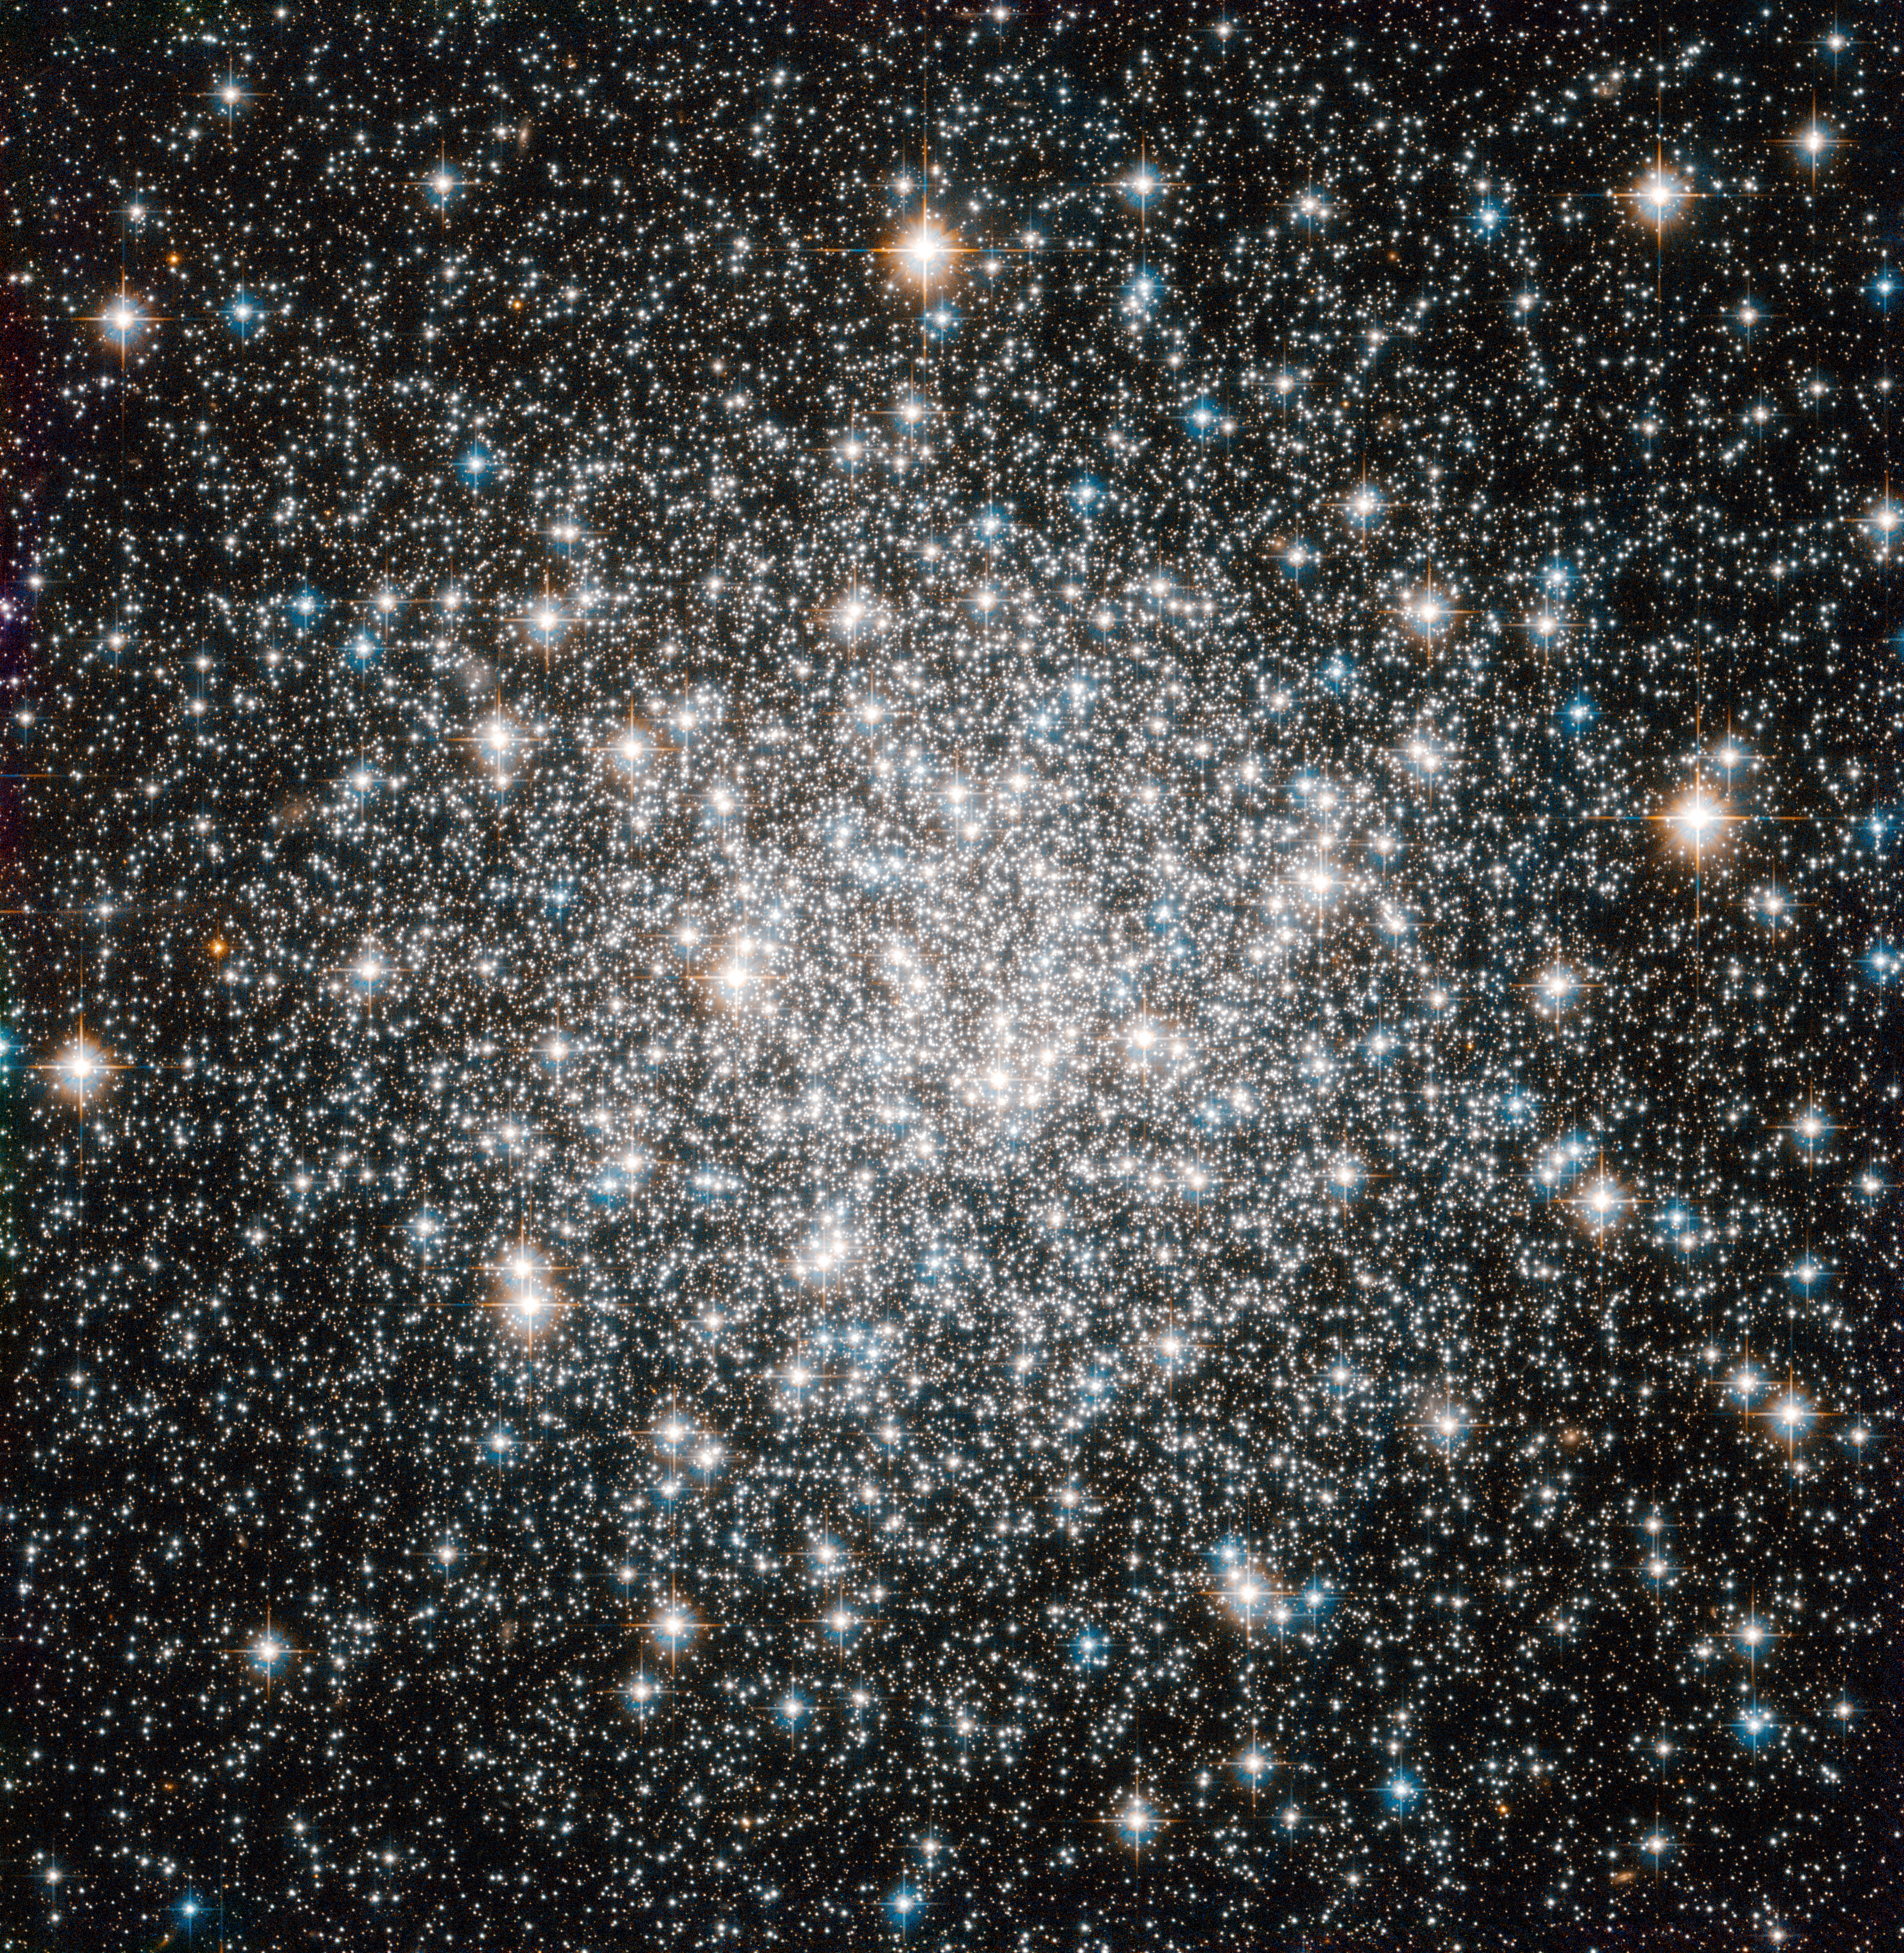

A ten billion year stellar dance

The NASA/ESA Hubble Space Telescope offers this delightful view of the crowded stellar encampment called Messier 68, a spherical, star-filled region of space known as a globular cluster. Mutual gravitational attraction amongst a cluster’s hundreds of thousands or even millions of stars keeps stellar members in check, allowing globular clusters to hang together for many billions of years.

Astronomers can measure the ages of globular clusters by looking at the light of their constituent stars. The chemical elements leave signatures in this light, and the starlight reveals that globular clusters' stars typically contain fewer heavy elements, such as carbon, oxygen and iron, than stars like the Sun. Since successive generations of stars gradually create these elements through nuclear fusion, stars having fewer of them are relics of earlier epochs in the Universe. Indeed, the stars in globular clusters rank among the oldest on record, dating back more than 10 billion years.

More than 150 of these objects surround our Milky Way galaxy. On a galactic scale, globular clusters are indeed not all that big. In Messier 68's case, its constituent stars span a volume of space with a diameter of little more than a hundred light-years. The disc of the Milky Way, on the other hand, extends over some 100 000 light-years or more.

Messier 68 is located about 33 000 light-years from Earth in the constellation Hydra (The Female Water Snake). French astronomer Charles Messier notched the object as the sixty-eighth entry in his famous catalogue in 1780.

Hubble added Messier 68 to its own impressive list of cosmic targets in this image using the Wide Field Camera of Hubble’s Advanced Camera for Surveys. The image, which combines visible and infrared light, has a field of view of approximately 3.4 by 3.4 arcminutes.

Credit: ESA/Hubble & NASA